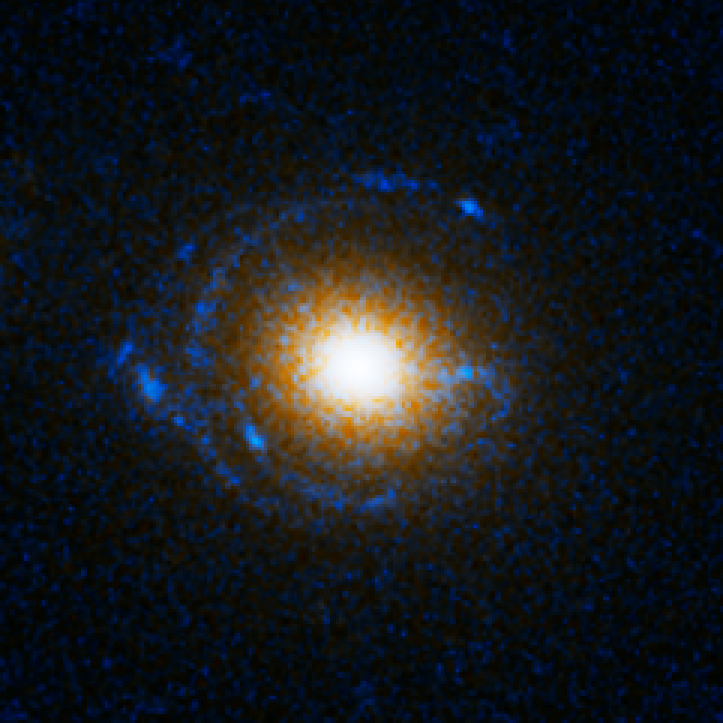

Einstein Ring Gravitational Lens: SDSS J163028.15+452036.2

This object is named SDSS J163028.15+452036.2. It is one of eight similar objects found by combining two powerful astronomical assets, the Sloan Digital Sky Survey (SDSS) and NASA's Hubble Space Telescope.

The objects are know as ‘Eienstein rings’ and are perhaps the most elegant manifestations of the gravitational lensing phenomina. Gravitational lensing occurs when the gravitational field from a massive object warps space and deflects light from a distant object behind it, allowing the distant object to be seen. Einstein rings are produced when two galaxies are almost perfectly aligned, one behind the other, giving an image like this with a reddish-white elliptical galaxy in the foreground and a thin ring of blue surrounding it — which is in fact the distorted light from another galaxy twice as far away.

Credit: NASA, ESA, A. Bolton (Harvard-Smithsonian CfA) and the SLACS Team